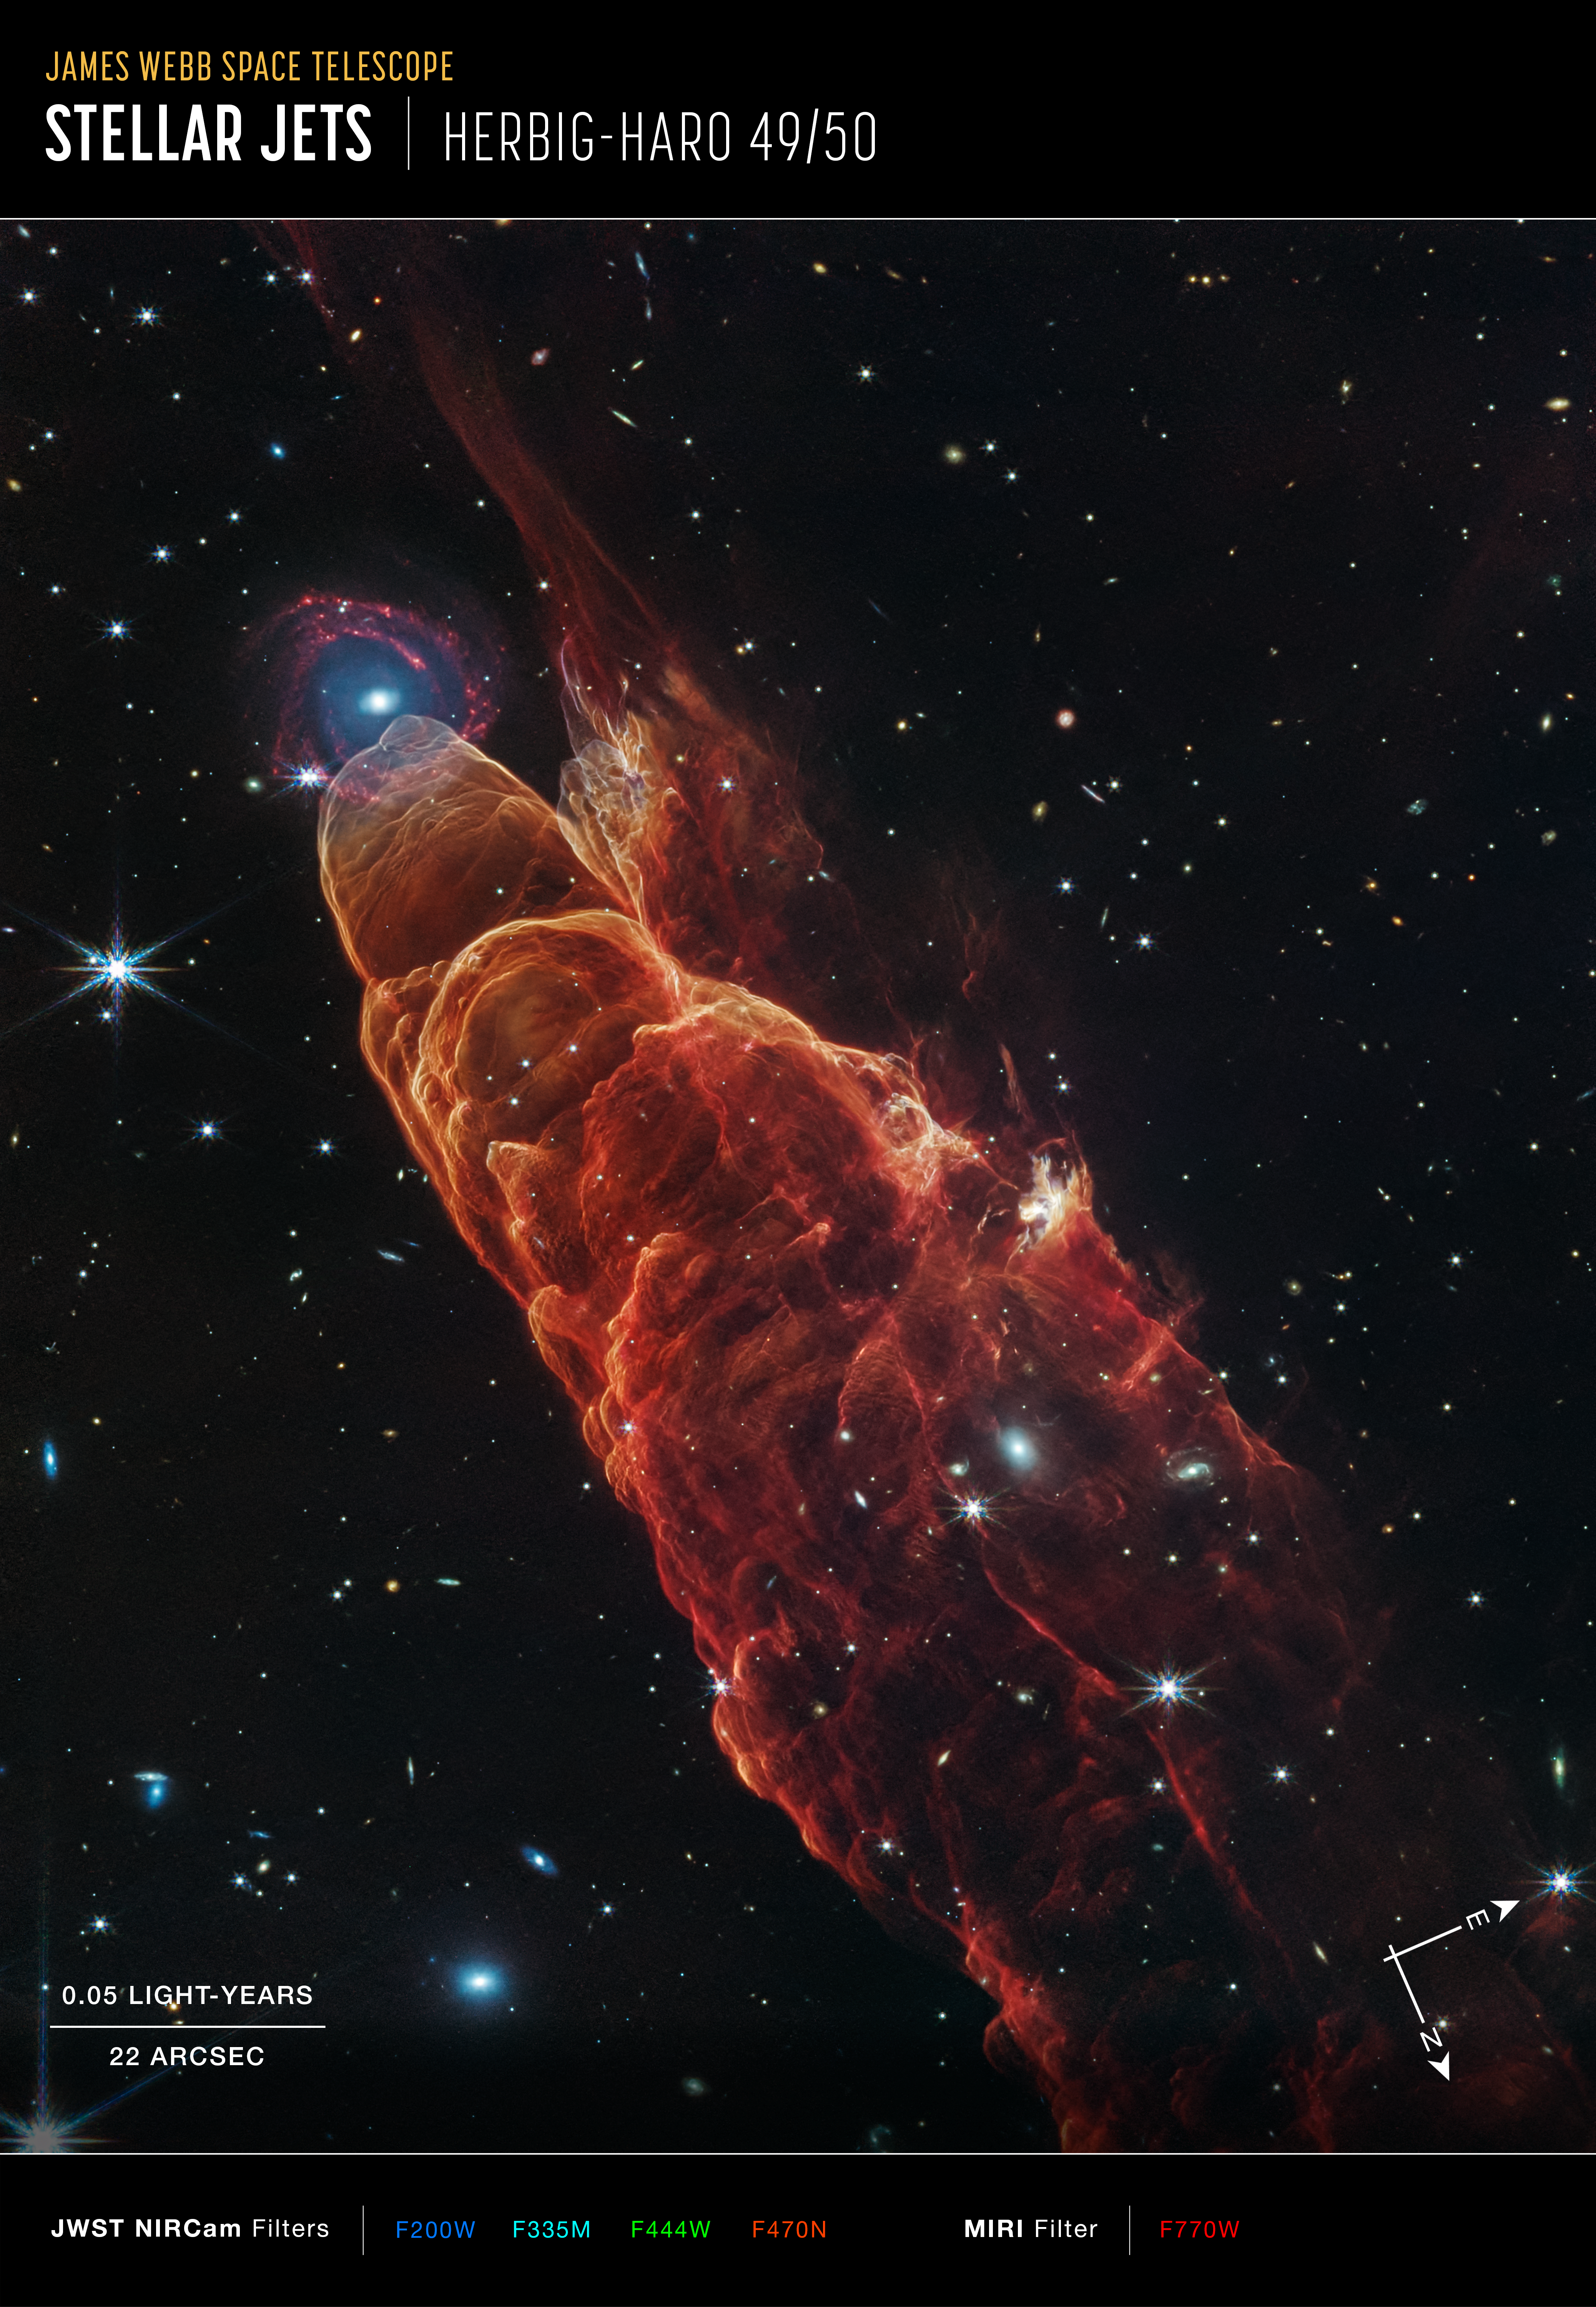

Herbig-Haro 49/50 (NIRCam and MIRI Image, annotated)

The NASA/ESA/CSA James Webb Space Telescope observed Herbig-Haro 49/50, an outflow from a nearby still-forming star, in high-resolution near- and mid-infrared light with the NIRCam and MIRI instruments. The intricate features of the outflow, represented in reddish-orange color, provide detailed clues about how young stars form and how their jet activity affects the environment around them. A chance alignment in this direction of the sky provides a beautiful juxtaposition of this nearby Herbig-Haro object (located within our Milky Way) with a more distant, face-on spiral galaxy in the background.

Protostars are young stars in the process of formation that generally launch narrow jets of material. These jets move through the surrounding environment, in some cases extending to large distances away from the protostar.

Like the water wake generated by a speeding boat, the arcs in this image are created by the fast-moving jet slamming into surrounding dust and gas. This ambient material is compressed and heats up, then cools by emitting light at visible and infrared wavelengths. In particular, the infrared light captured here by Webb highlights molecular hydrogen and carbon monoxide.

The galaxy that appears by happenstance at the tip of Herbig-Haro 49/50 is a much more distant spiral galaxy. It has a prominent central bulge represented in blue that shows the location of older stars. It also displays hints of “side lobes,” suggesting that this could be a barred-spiral galaxy. Reddish clumps within the spiral arms show the locations of warm dust and groups of forming stars.

In the image background there are many more galaxies at further distances, including galaxies that shine through the diffuse infrared glow of the nearby Herbig-Haro object.

Credit: NASA, ESA, CSA, STScI